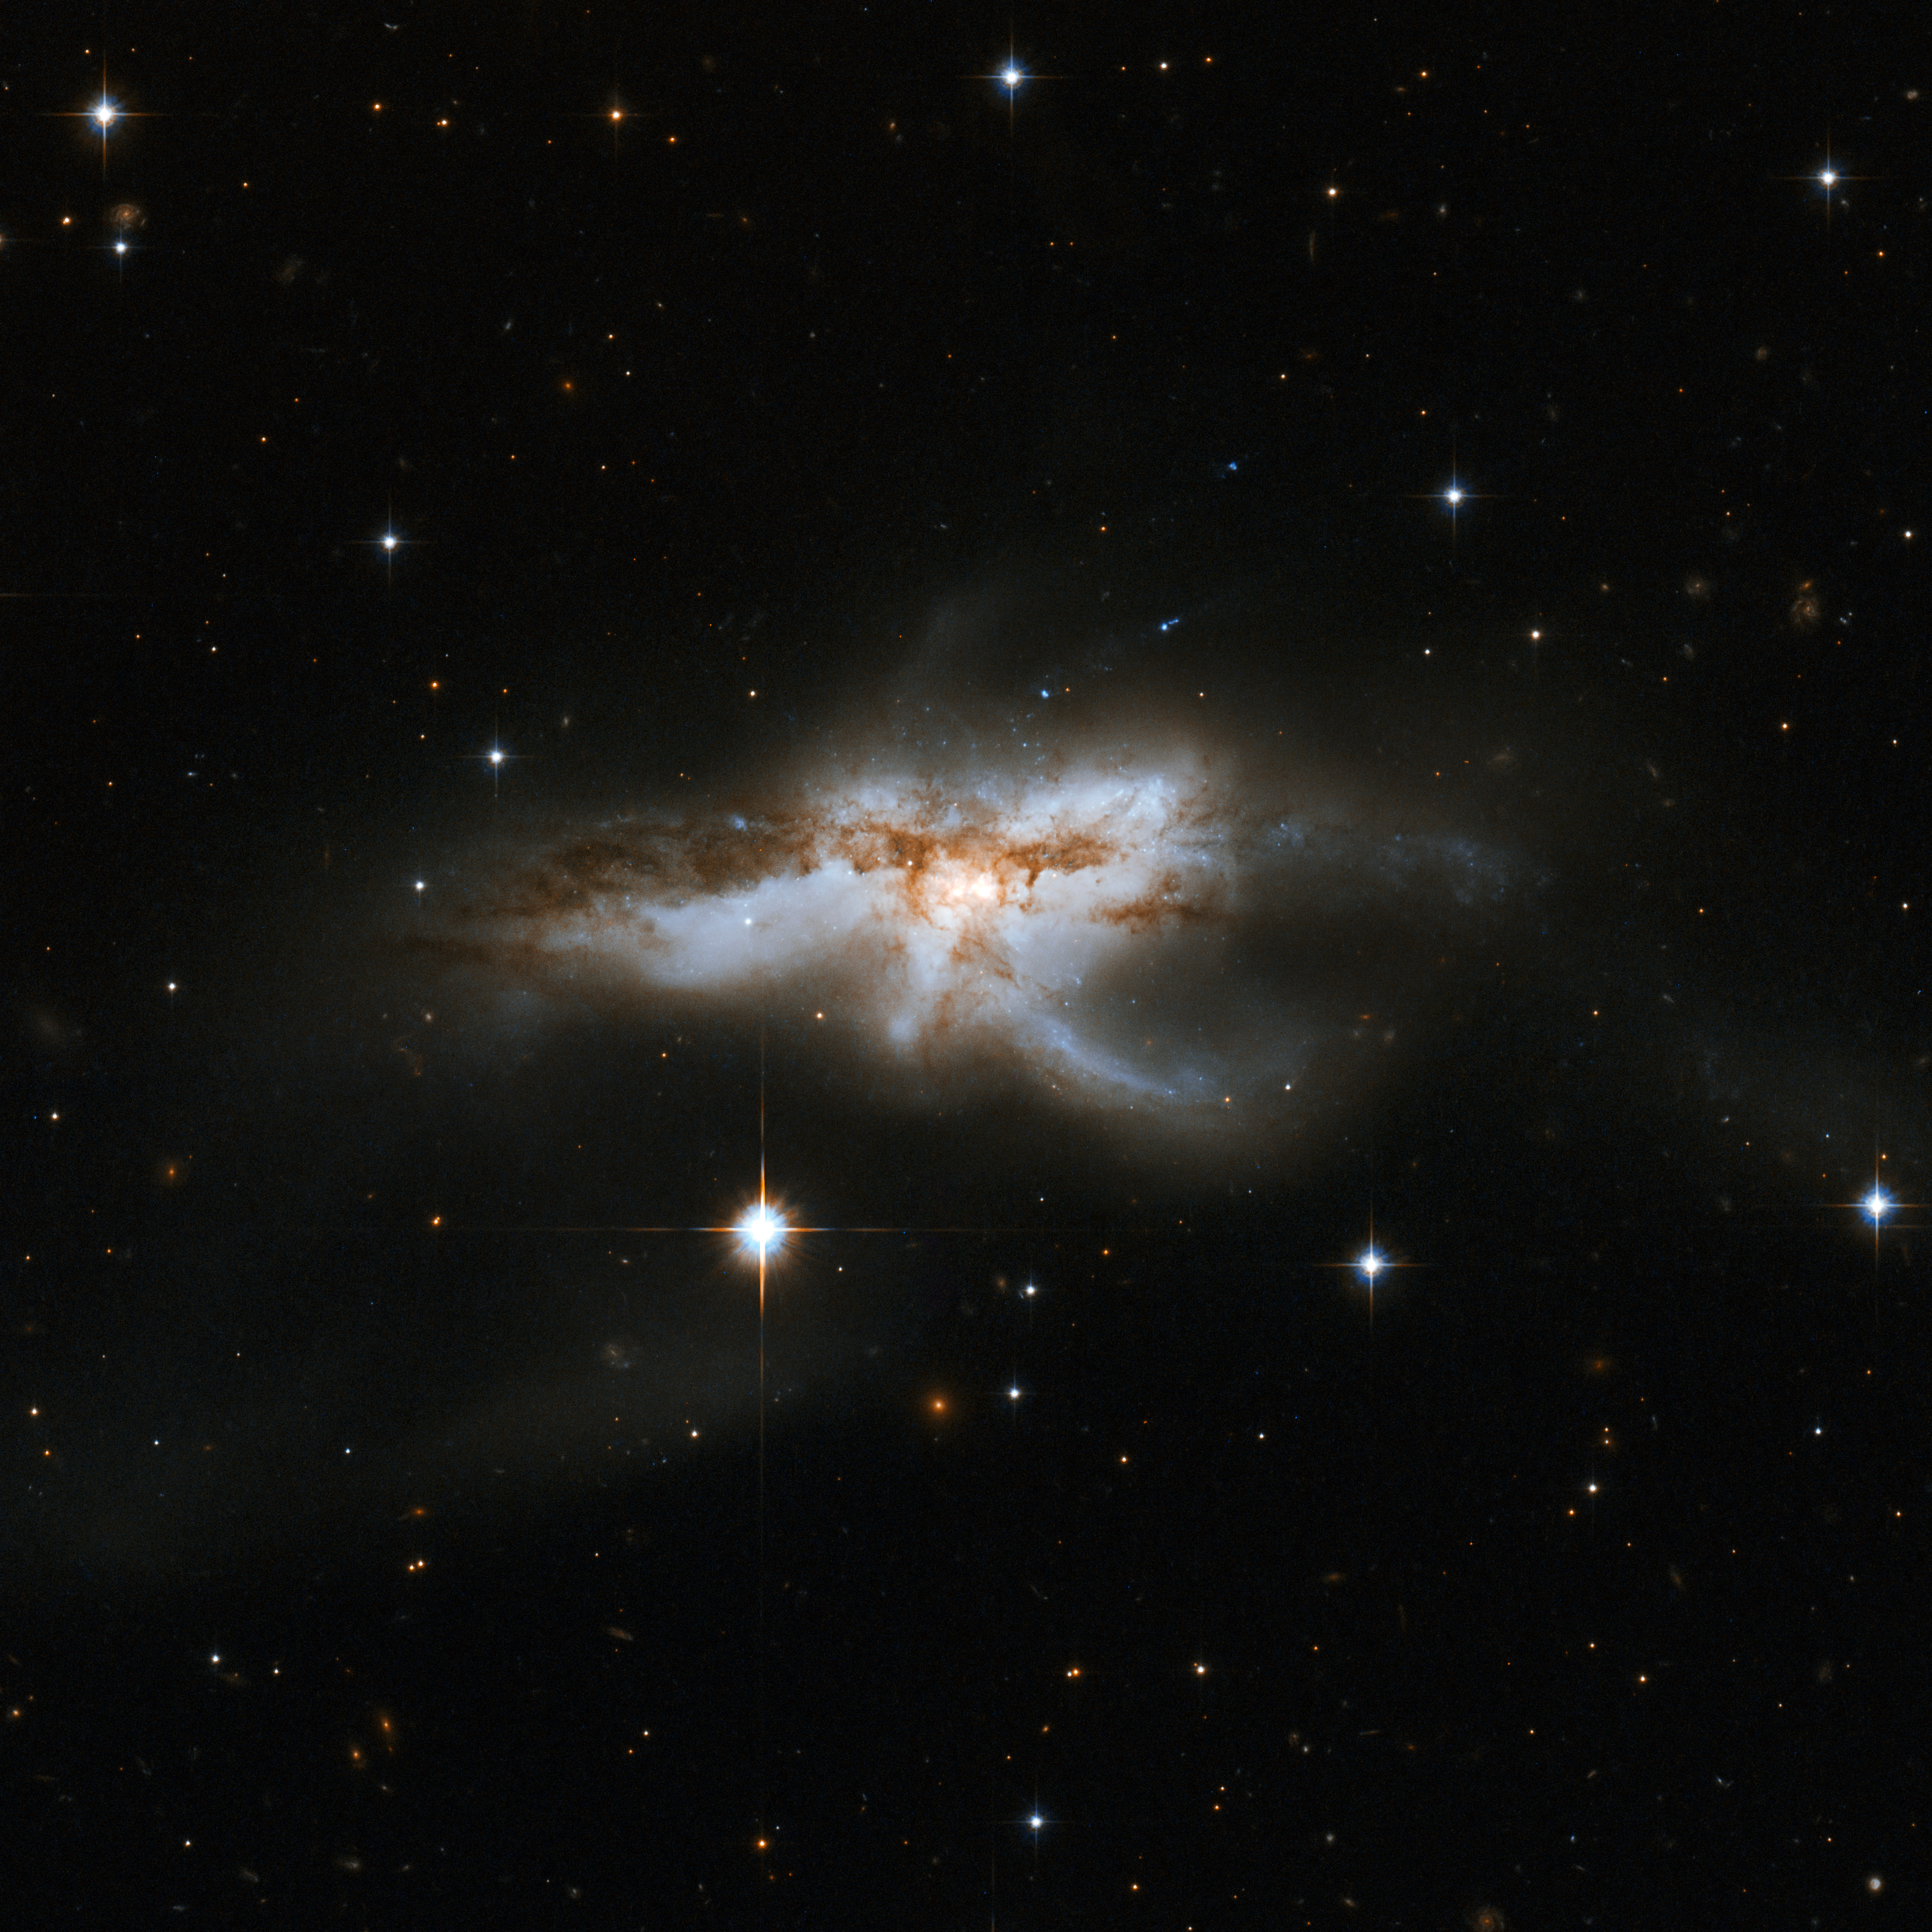

NGC 6240

NGC 6240 is a peculiar, butterfly- or lobster-shaped galaxy consisting of two smaller merging galaxies. It lies in the constellation of Ophiuchus, the Serpent Holder, some 400 million light-years away. Observations with NASA's Chandra X-ray Observatory have disclosed two giant black holes, about 3,000 light-years apart, which will drift toward one another and eventually merge together into a larger black hole. The merging process triggered dramatic star formation and sparked numerous supernova explosions. The merger will be complete in some tens to hundreds of millions of years.

This image is part of a large collection of 59 images of merging galaxies taken by the Hubble Space Telescope and released on the occasion of its 18th anniversary on 24th April 2008.

Credit: NASA, ESA, the Hubble Heritage Team (STScI/AURA)-ESA/Hubble Collaboration and A. Evans (University of Virginia, Charlottesville/NRAO/Stony Brook University)